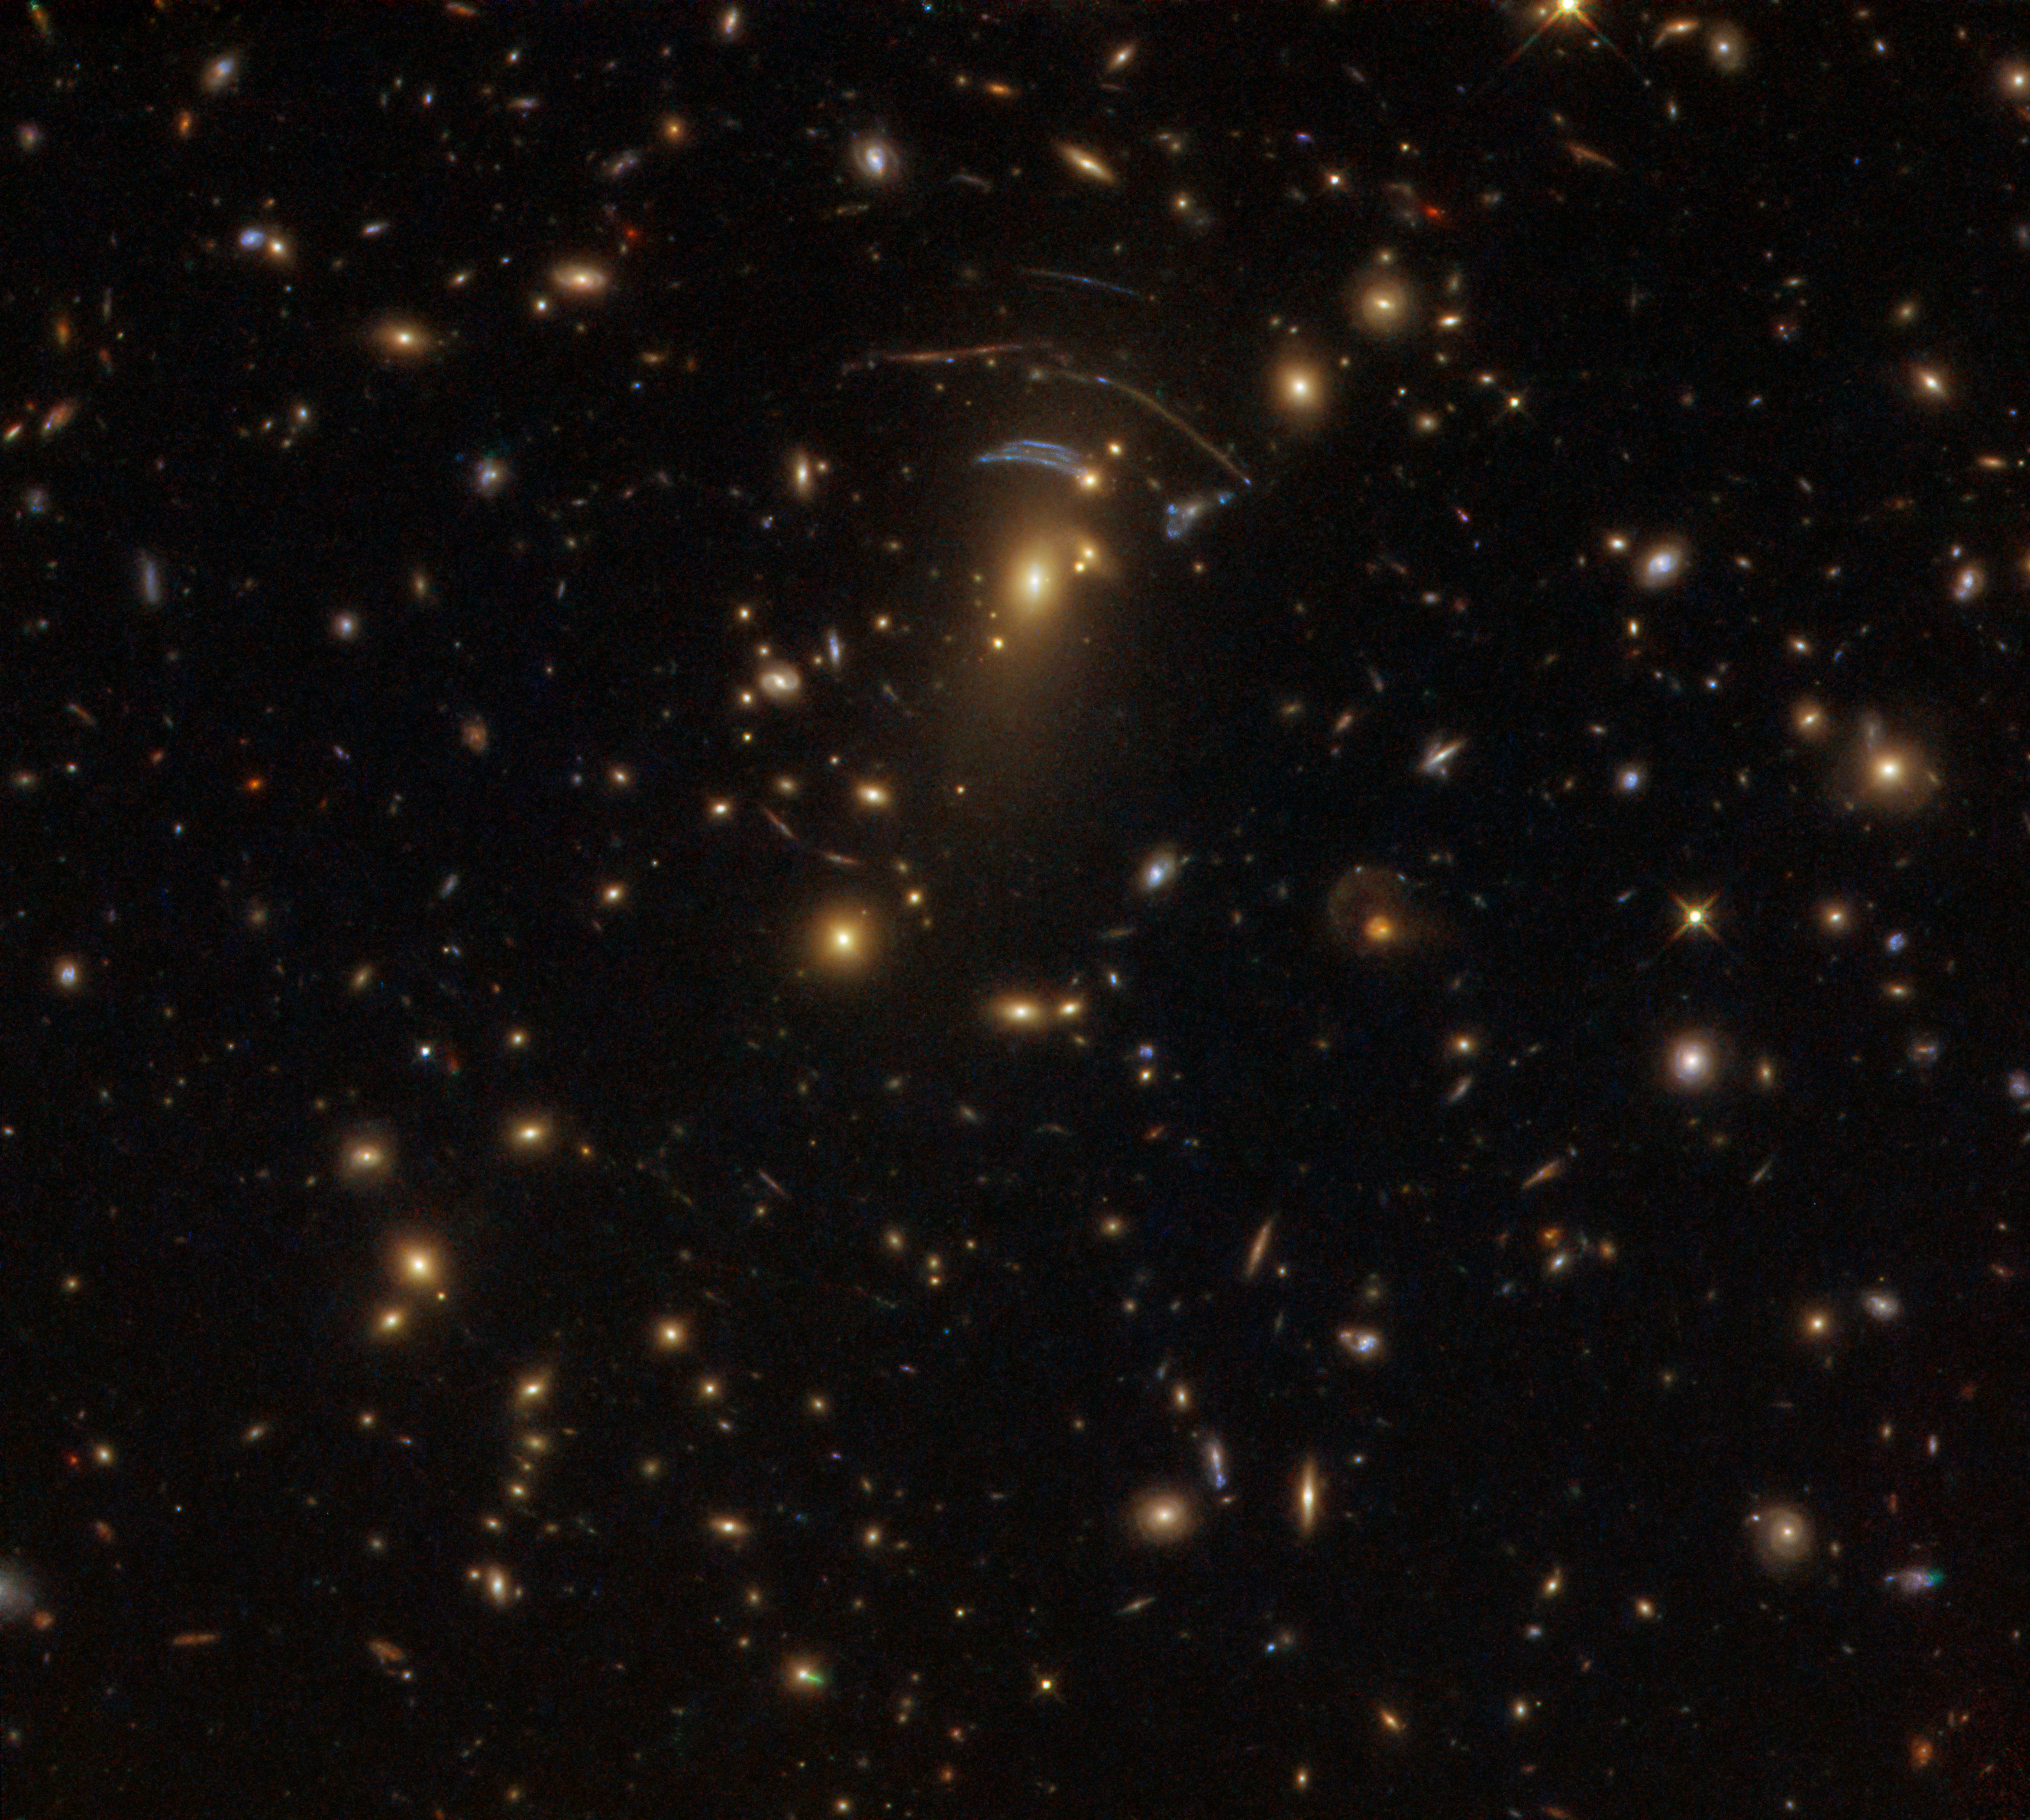

Awesome gravity

Gravity is so much a part of our daily lives that it is all too easy to forget its awesome power — but on a galactic scale, its power becomes both strikingly clear and visually stunning.

This image was taken with the NASA/ESA Hubble Space Telescope’s Wide Field Camera 3 (WFC3) and shows an object named SDSS J1138+2754. It acts as a gravitational lens illustrates the true strength of gravity: A large mass — a galaxy cluster in this case — is creating such a strong gravitational field that it is bending the very fabric of its surroundings. This causes the billion-year-old light from galaxies sitting behind it to travel along distorted, curved paths, transforming the familiar shapes of spirals and ellipticals (visible in other parts of the image) into long, smudged arcs and scattered dashes.

Some distant galaxies even appear multiple times in this image. Since galaxies are wide objects, light from one side of the galaxy passes through the gravitational lens differently than light from the other side. When the galaxies’ light reaches Earth it can appear reflected, as seen with the galaxy on the lower left part of the lens, or distorted, as seen with the galaxy to the upper right.

This data were taken as part of a research project on star formation in the distant Universe, building on Hubble’s extensive legacy of deep-field images. Hubble observed 73 gravitationally-lensed galaxies for this project.

Credit: ESA/Hubble & NASA Acknowledgement: Judy Schmidt